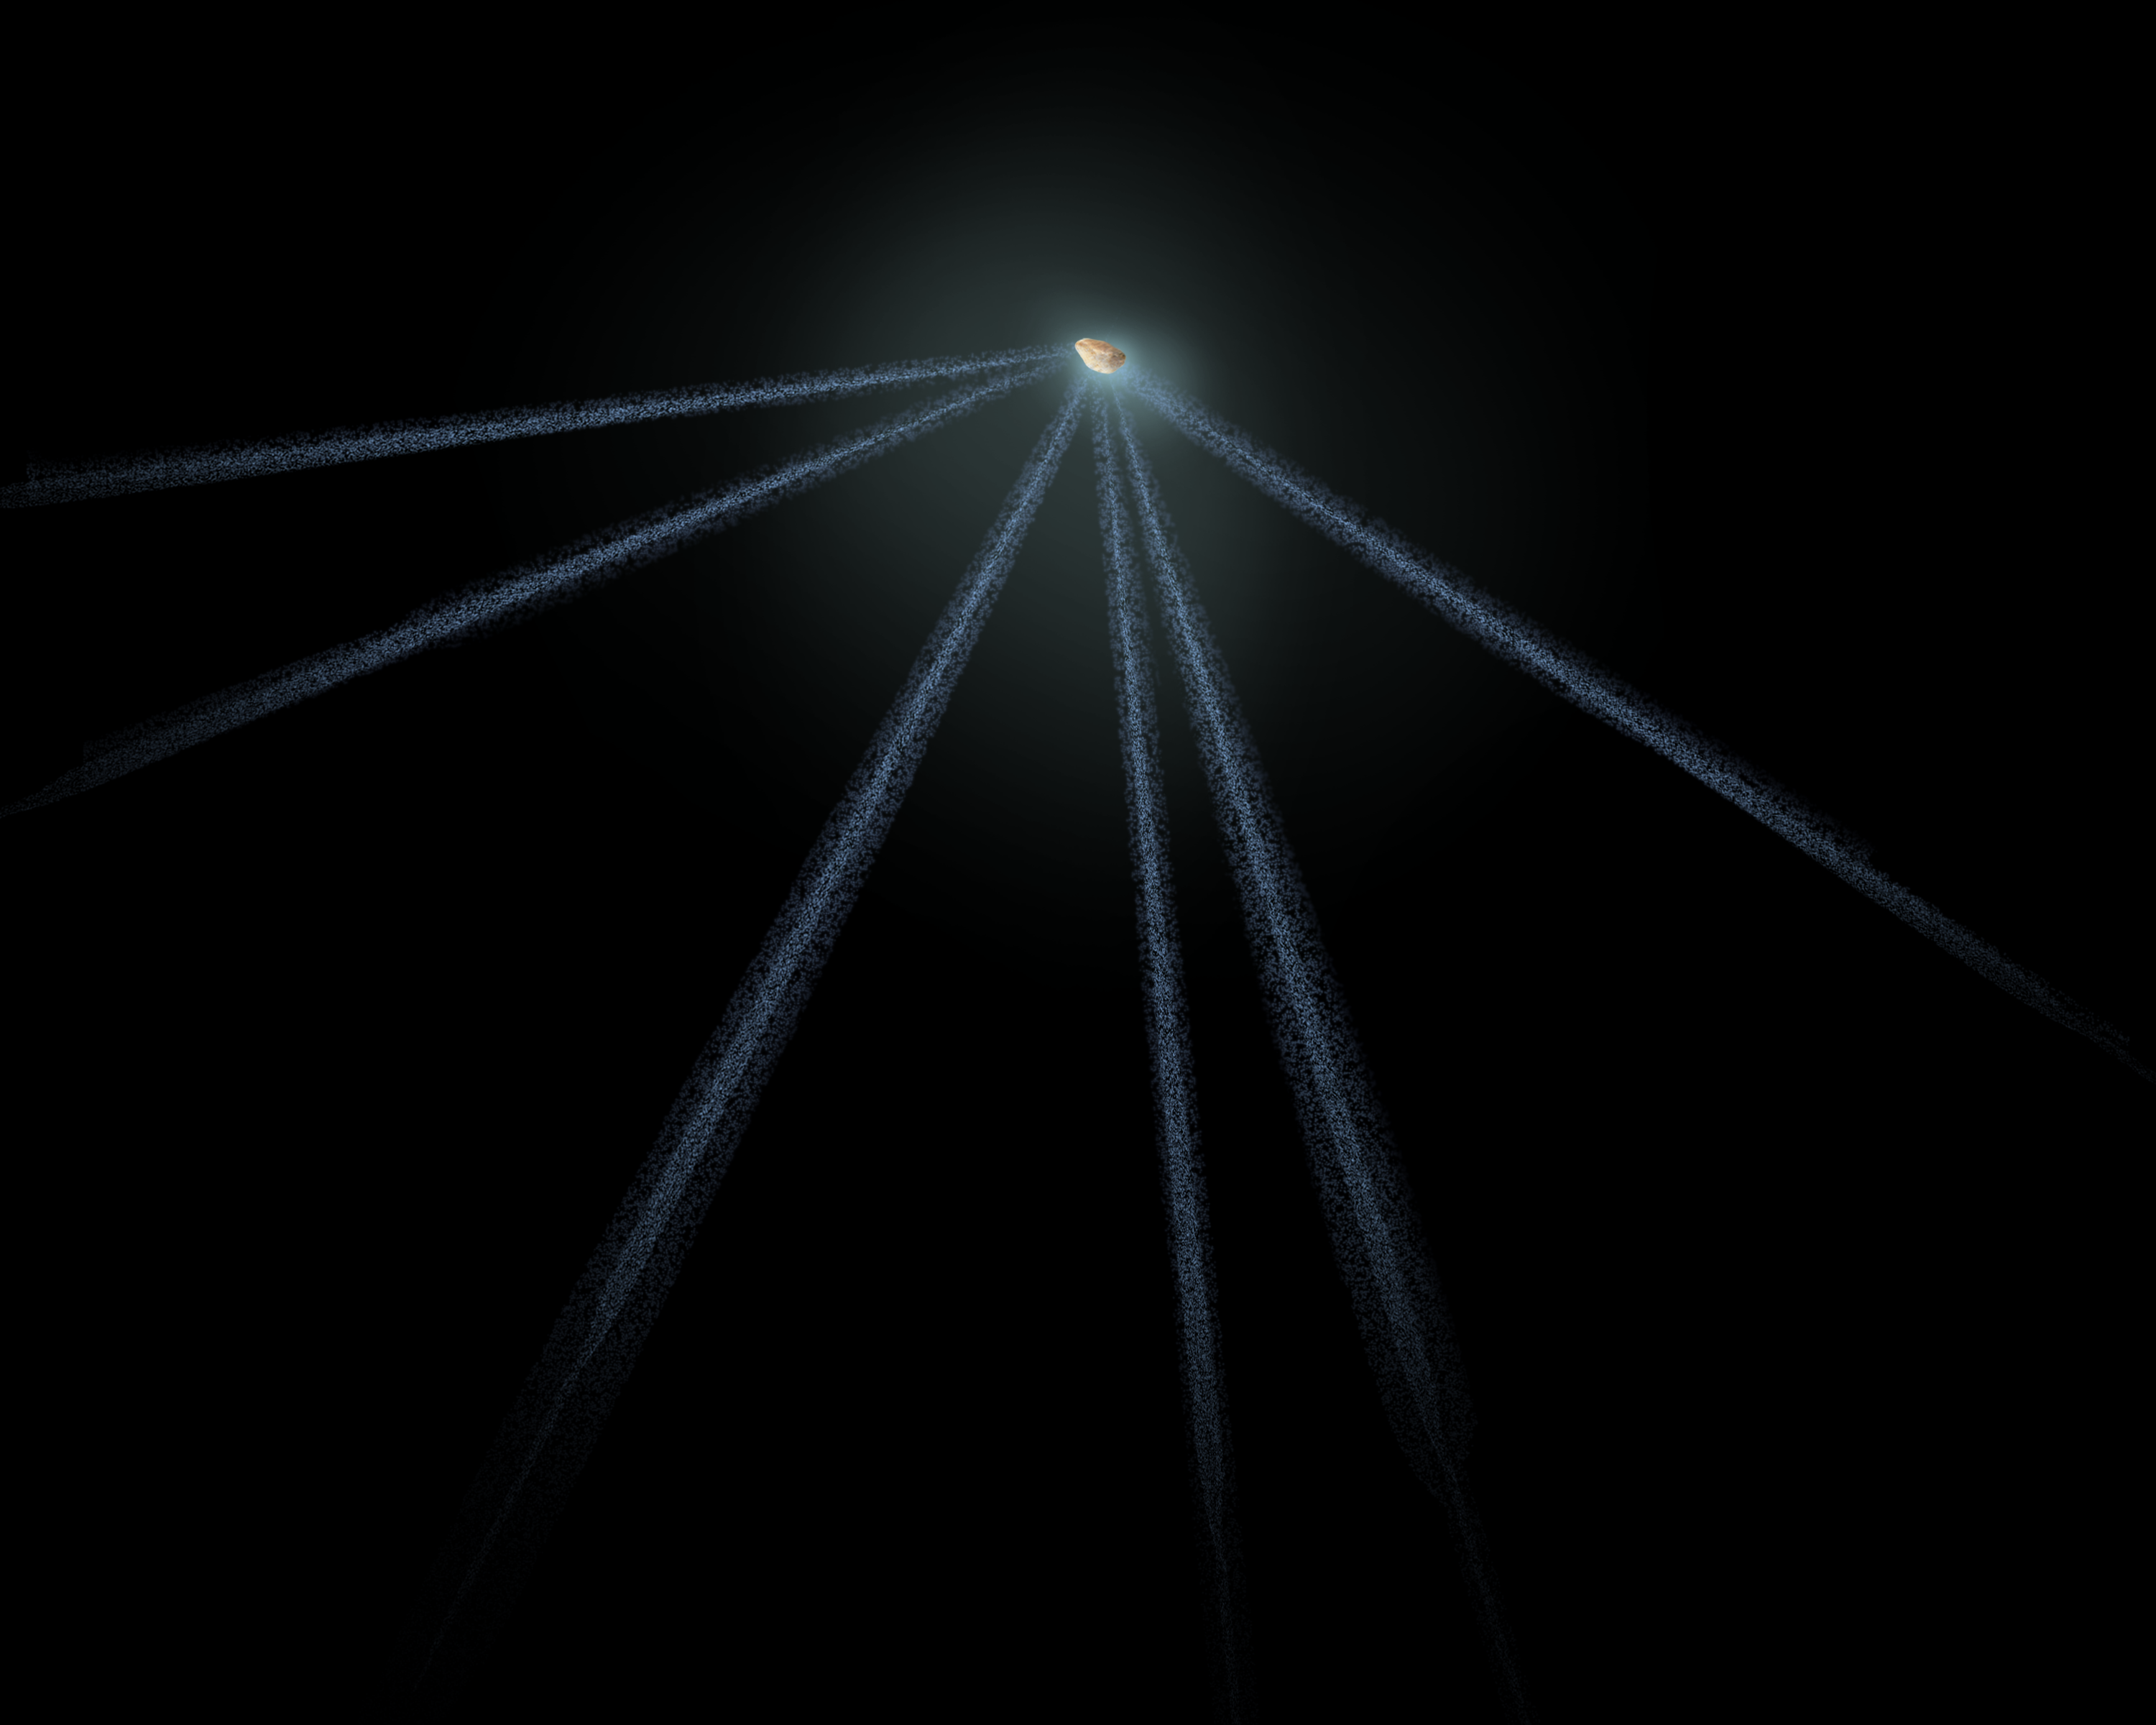

Schematic of active asteroid P/2013 P5

This is a diagram of the structure seen around an active asteroid designated P/2013 P5. The NASA/ESA Hubble Space Telescope imaged six dust tails in September 2013. One interpretation is that the asteroid's rotation rate has increased to the point where dust is falling off the surface along the equator and escaping into space. The pressure of sunlight then sweeps the dust into long tails. The entire structure rotates like a wheel.

Credit: NASA, ESA, and A. Feild (STScI)